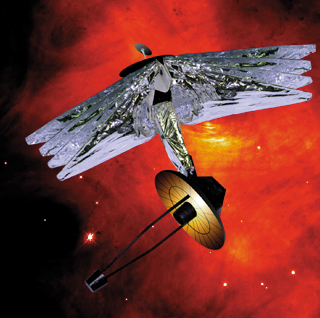

Ball Aerospace design

This design by Ball Aerospace features four widely separated sunshields that are effective in reducing the temperature of the telescope optics and the science instrument compartment. The deployable primary mirror is mounted on three hinged slices of a 26-foot (8 meters) circular structure. By rolling the spacecraft so that the sunshade is always perpendicular to the Sun, the telescope can view half of the sky. The Ball model is designed for launch to L2 or similar orbits.

Credit: Ball Aerospace